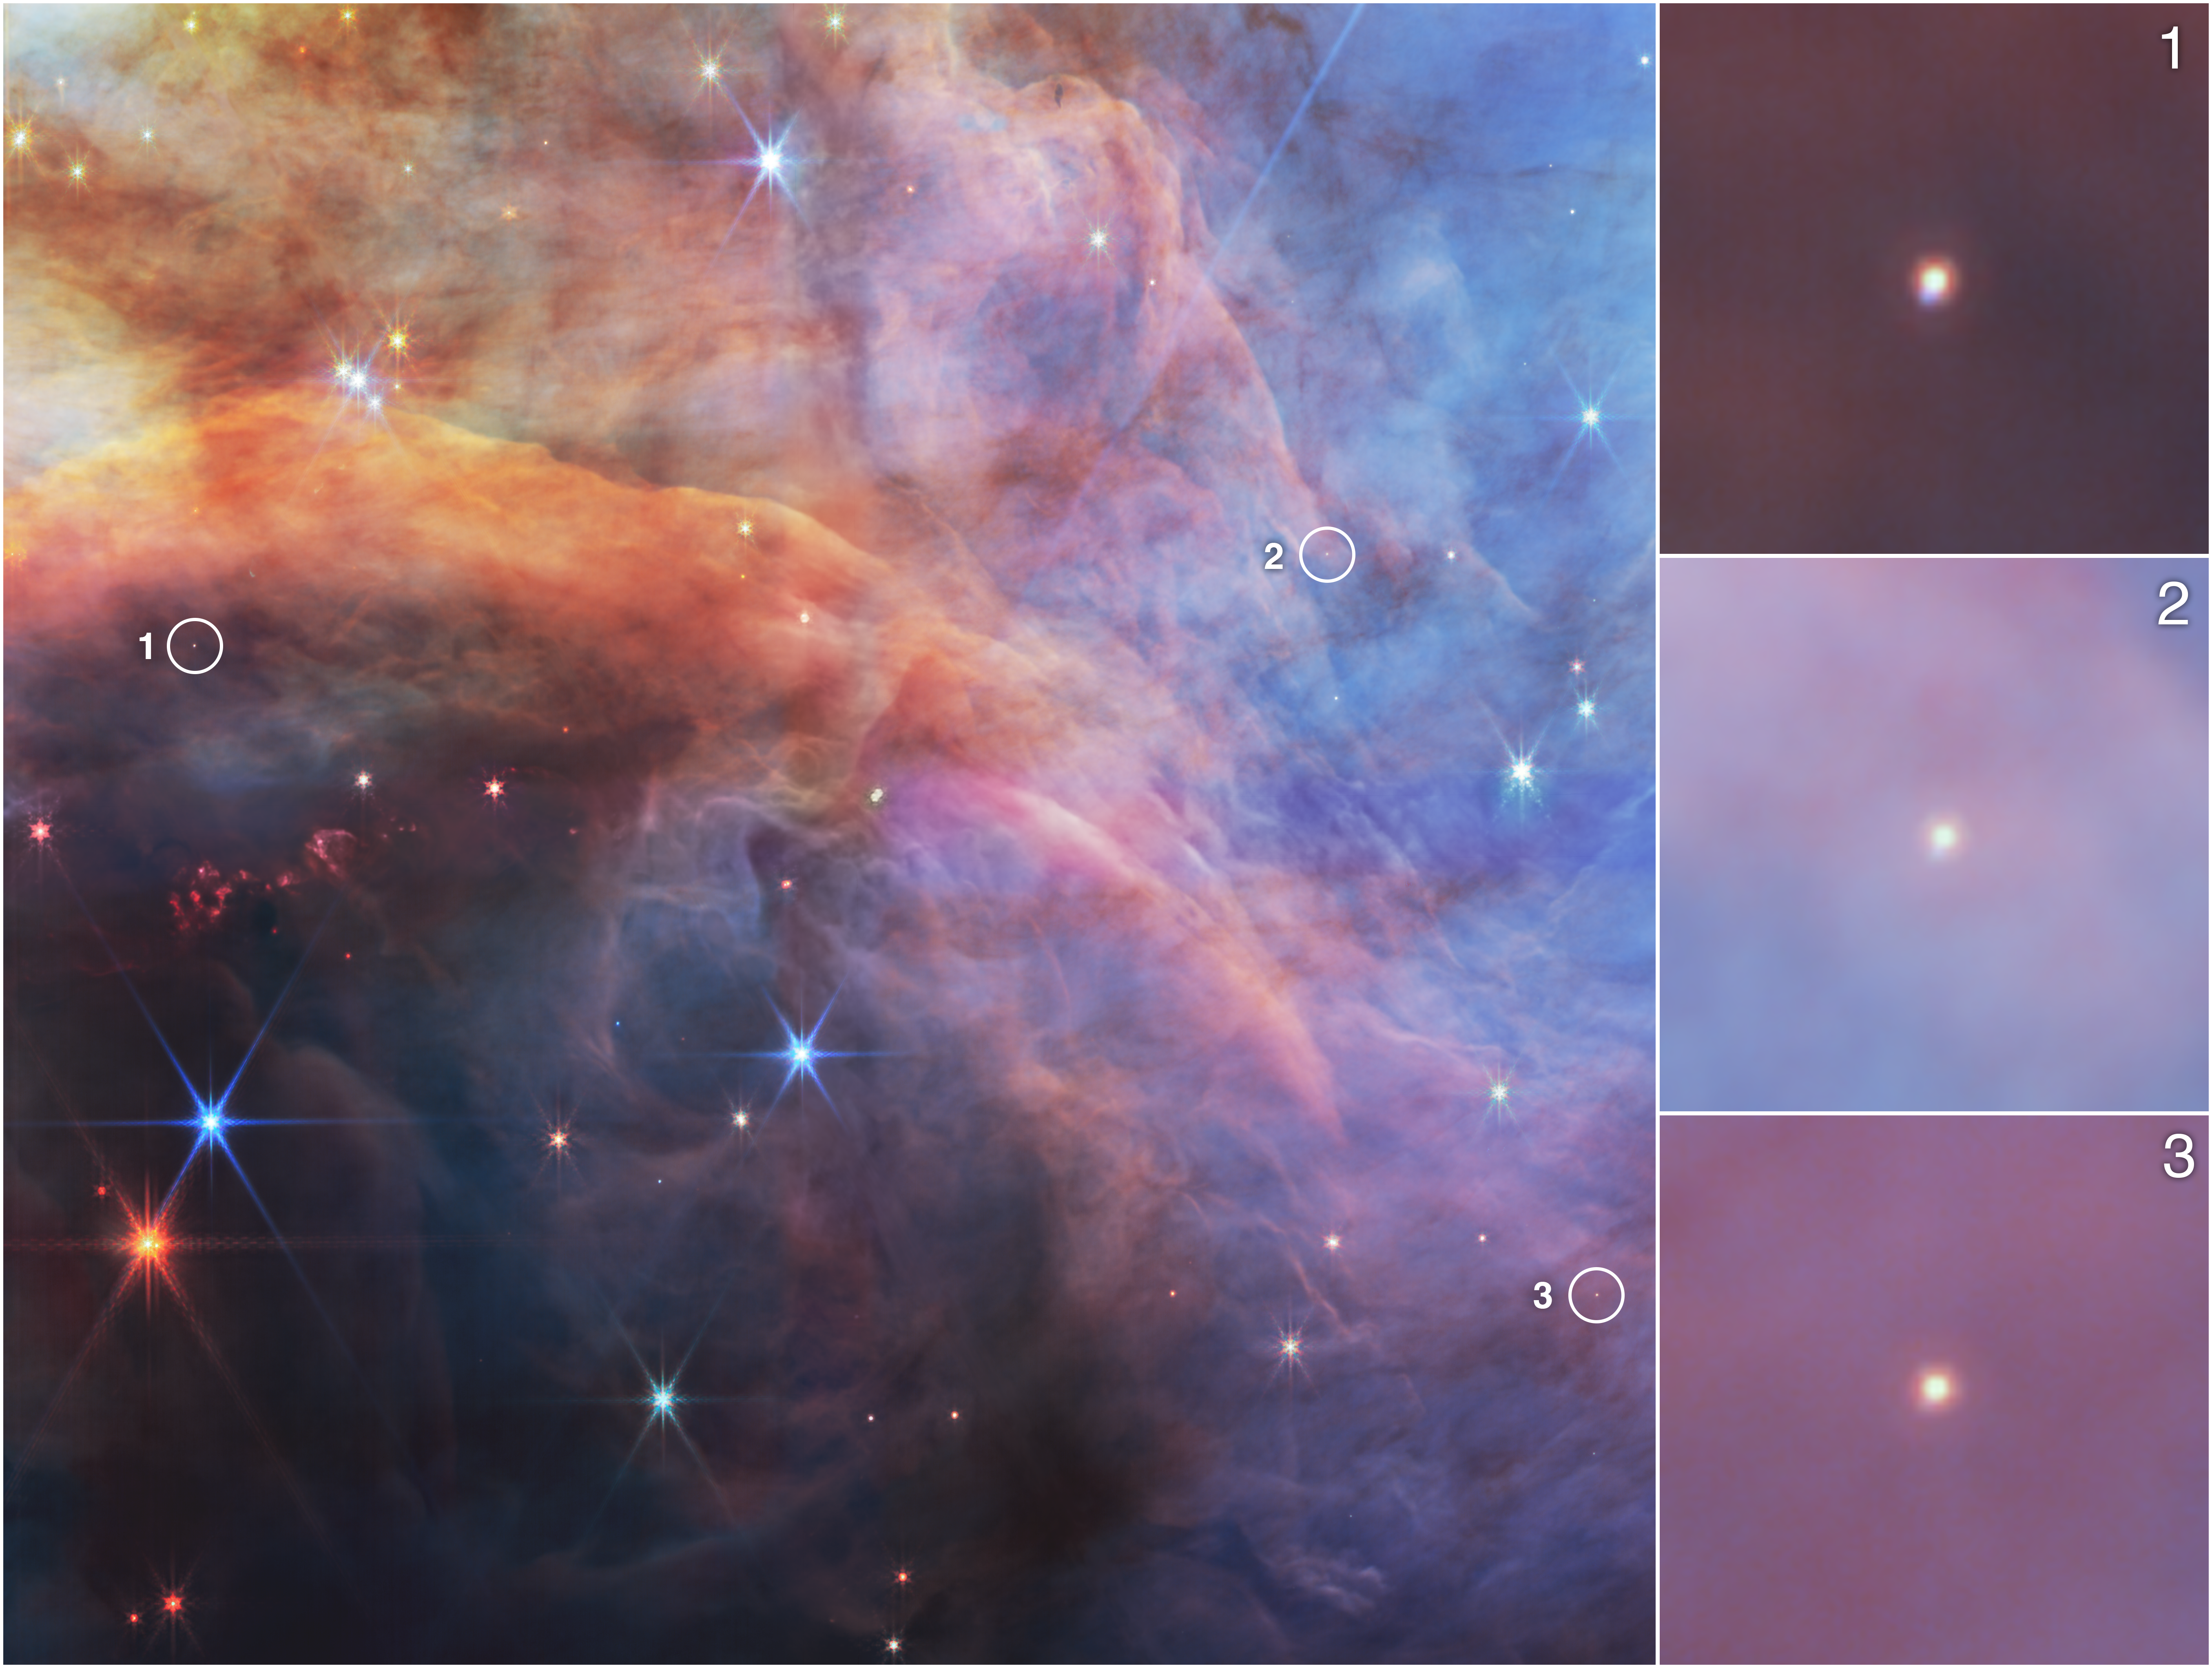

Low mass objects within the Flame Nebula in infrared light

The Flame Nebula, located about 1,400 light-years away from Earth, is a hotbed of star formation less than 1 million years old. Within the Flame Nebula, there are objects so small that their cores will never be able to fuse hydrogen like full-fledged stars—brown dwarfs.

This near-infrared image of a portion of the Flame Nebula from the NASA/ESA/CSA James Webb Space Telescope highlights three low-mass objects, seen in the insets to the right. These objects, which are much colder than protostars, require the sensitivity of Webb’s instruments to detect them. These objects were studied as part of an effort to explore the lowest mass limit of brown dwarfs within the Flame Nebula.

In this image, light at wavelengths of 1.15 microns and 1.4 microns (filters F115W and F140M) is represented as blue, 1.82 microns (F182M) as green, 3.6 microns (F360M) as orange, and 4.3 microns (F430M) as red.

Credit: NASA, ESA, CSA, STScI, M. Meyer (University of Michigan)